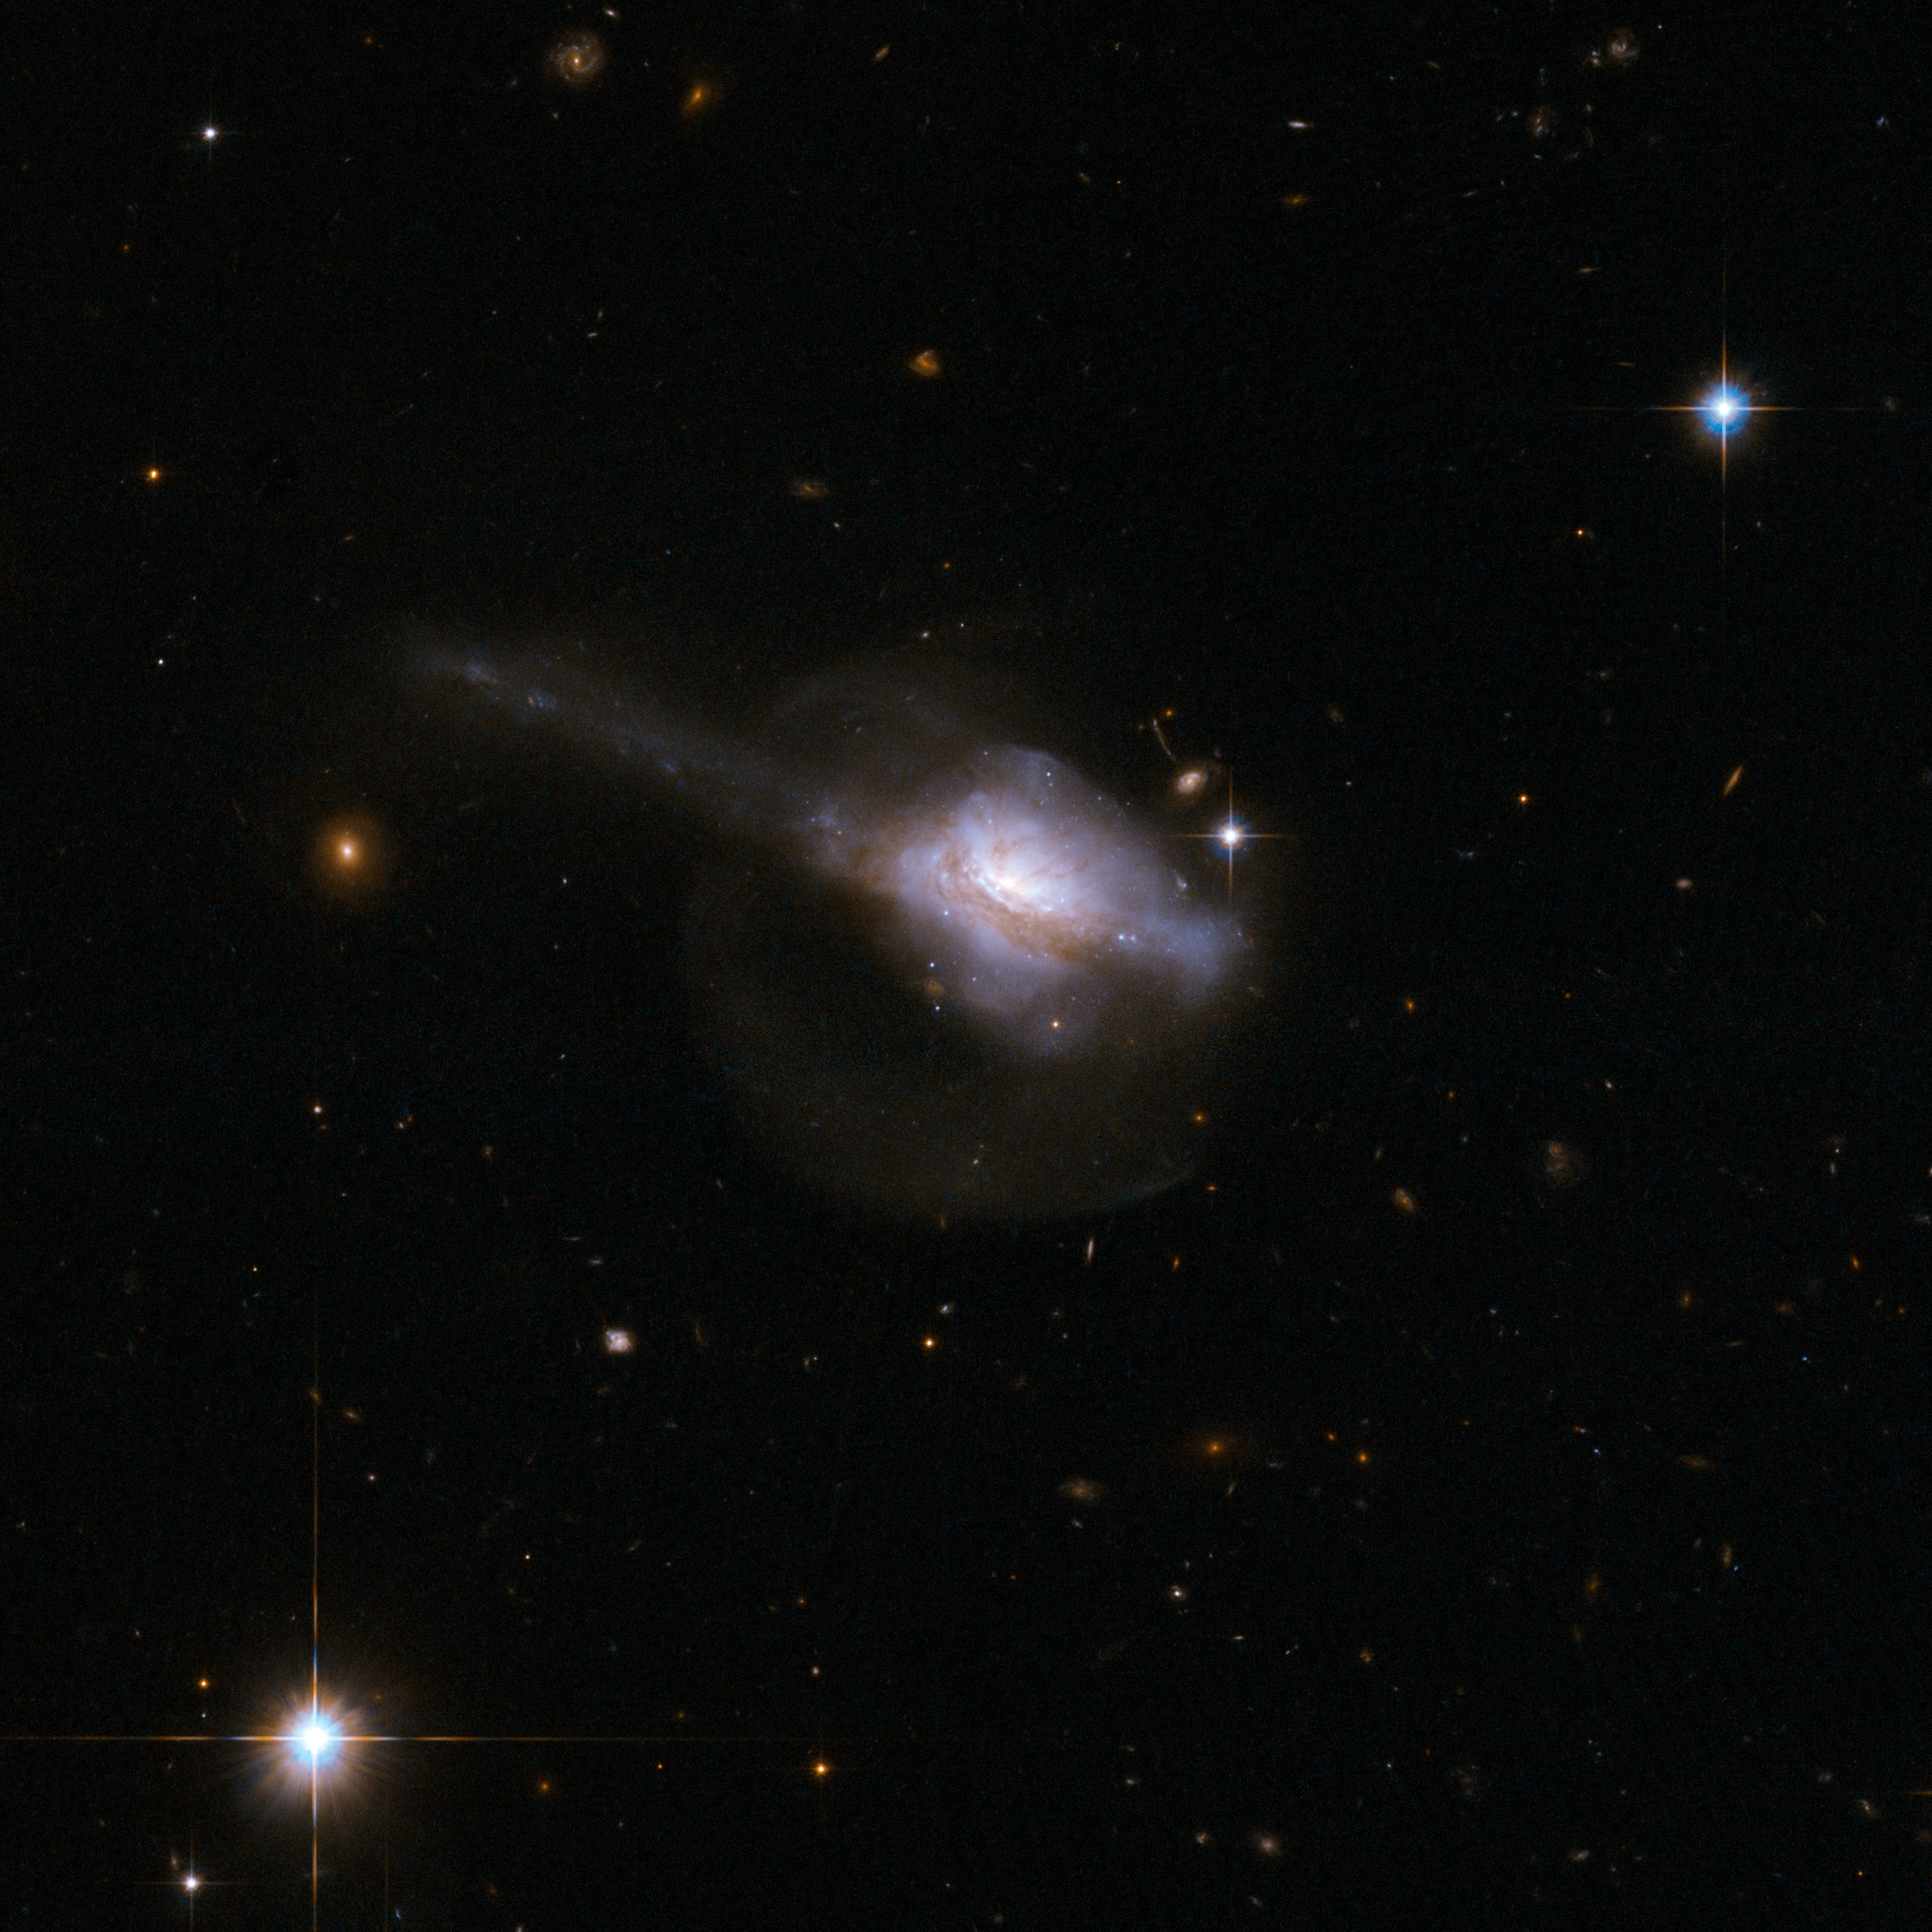

UGC 5101

UGC 5101 is a peculiar galaxy with a single nucleus contained within an unstructured main body that suggests a recent interaction and merger. NGC 5101 is thought to contain an active galactic nucleus - an extremely bright, compact core - buried deep in the gas and dust. A pronounced tail extends diagonally to the top-left of the frame. A fainter halo of stars surrounds the galaxy and is visible in the image, due to Hubble's ability to collect and detect faint light. This halo is probably a result of the earlier collision. UCG 5101 is about 550 million light-years away from Earth.

This image is part of a large collection of 59 images of merging galaxies taken by the Hubble Space Telescope and released on the occasion of its 18th anniversary on 24th April 2008.

Credit: NASA, ESA, the Hubble Heritage Team (STScI/AURA)-ESA/Hubble Collaboration and A. Evans (University of Virginia, Charlottesville/NRAO/Stony Brook University)